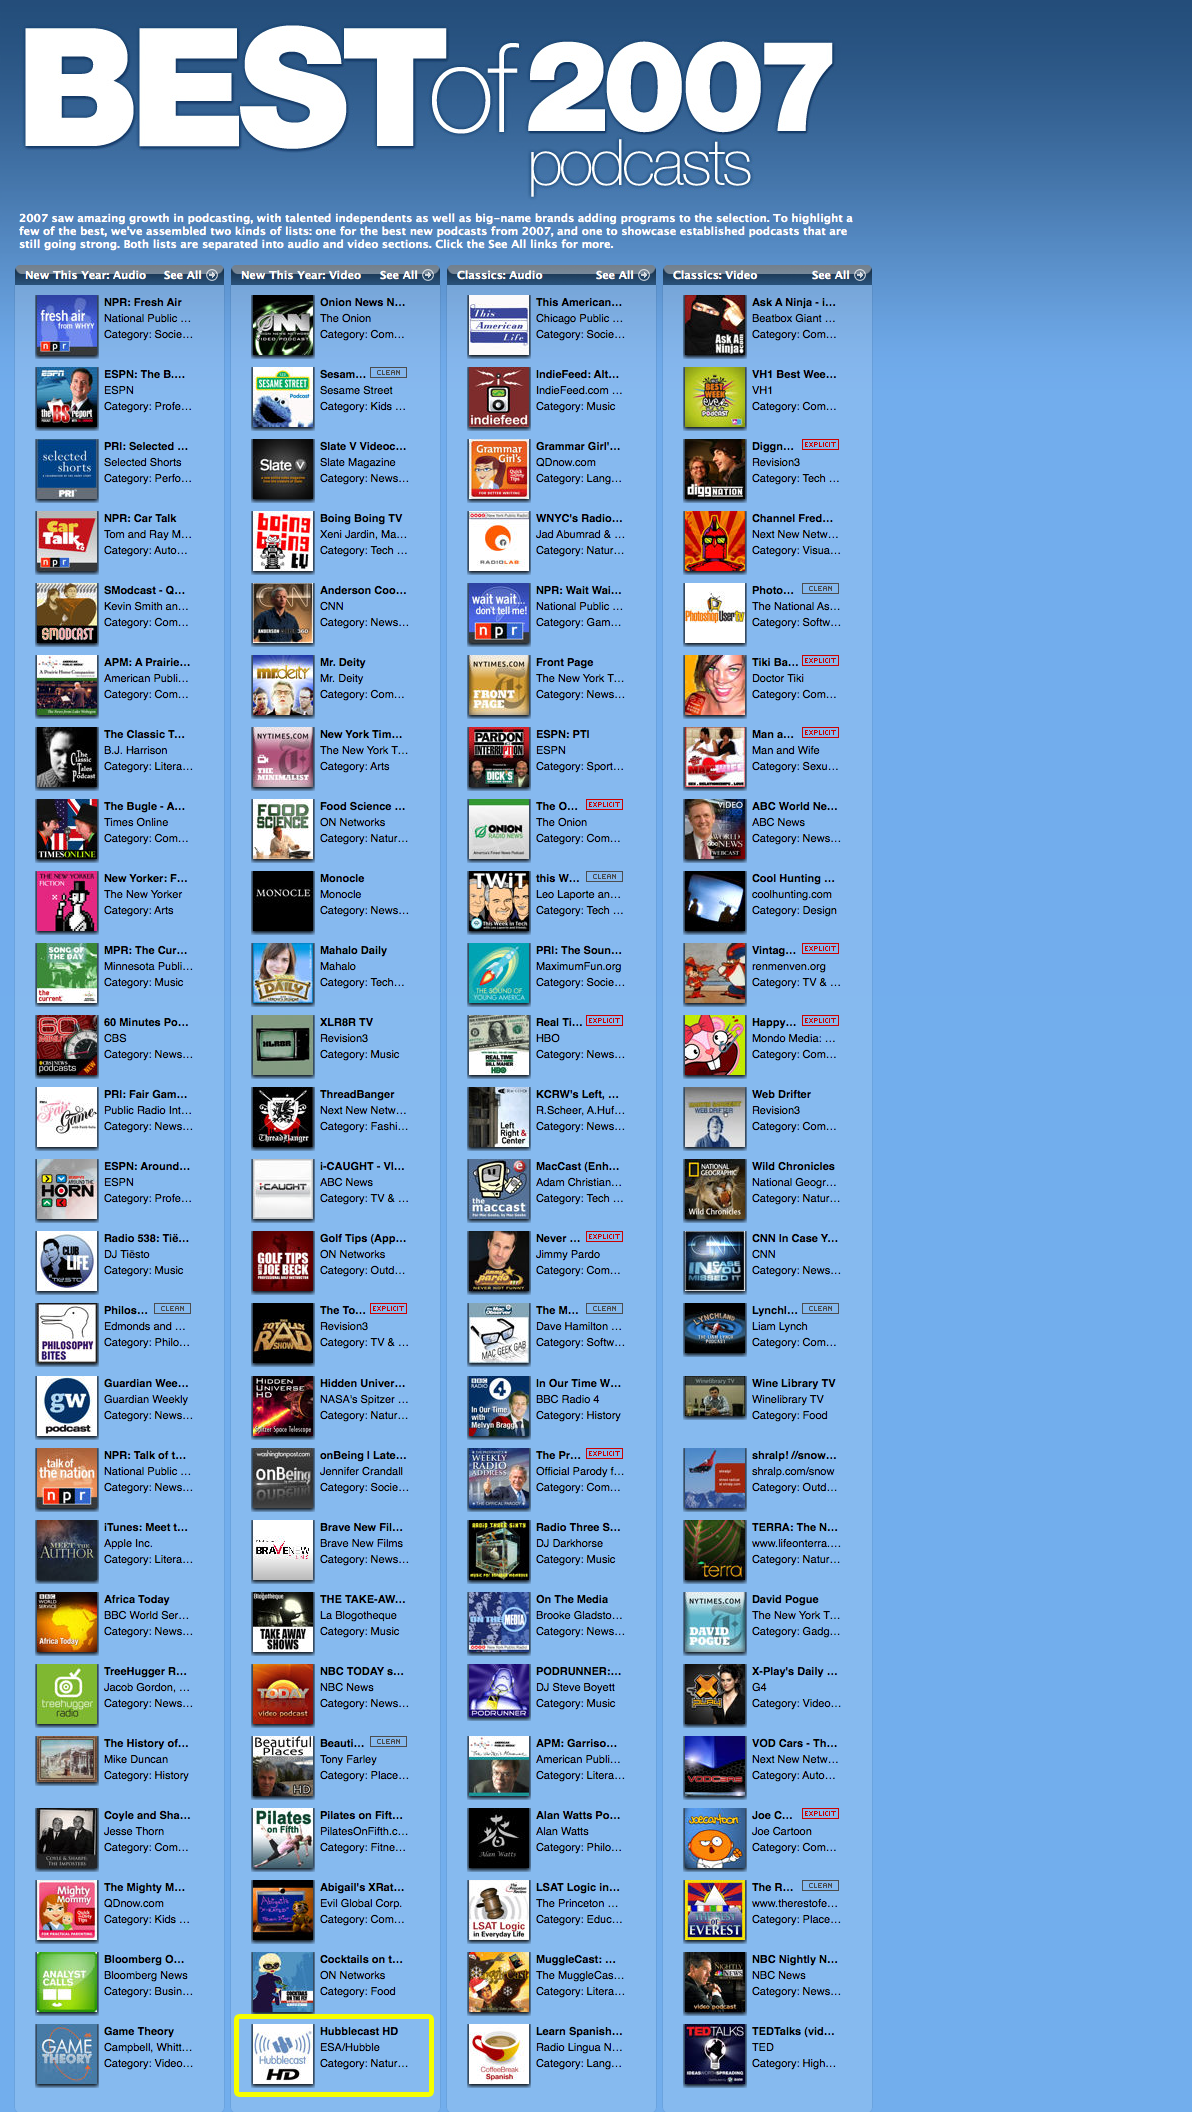

Hubblecast HD awarded "Top 25 new 2007 vodcasts" status by iTunes

Less than one year after its launch, the Hubblecast HD video podcast (vodcast) series has become a tremendous success. It has just been awarded a position among the best new 25 video podcasts in 2007 by the Apple iTunes store.

Hubblecast is the name for a series of free video podcasts that presents the latest news and beautiful images related with the science produced by the Hubble Space Telescope. Its target group is laypeople interested in astronomy and the amazing images from outer space. The "HD" stands for "High Definition", and is the standard format that can be watched on online movie players such as the AppleTV. However, Hubblecast HD can also be watched on any computer screen. Two other Hubblecast channels are available: "Hubblecast" which is low resolution and Hubblecast Full HD, using the 1080p format (1920 x 1080 pixels).

It is easy to find Hubblecast HD in iTunes: just search for Hubblecast in the search field.

For more details on the Hubblecast go to: http://www.spacetelescope.org/videos/hubblecast

Credit: NASA & ESA